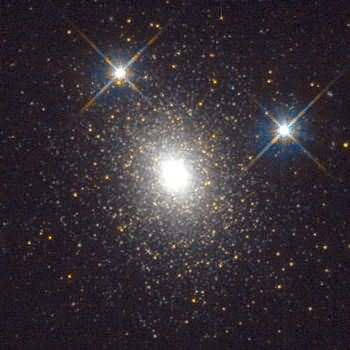

HST image of an old globular star cluster in galaxy M31

We believe our HST observations of NGC 4038/4039 and other merger galaxies also shed some new light on how young globular clusters form, i.e., from giant clouds of hydrogen gas that astronomers call Giant Molecular Clouds. Full-grown spiral galaxies like the Milky Way have typically 1000-2000 such clouds. An example is the GMC associated with the Eagle Nebula.

Credit: Michael Rich, Kenneth Mighell, and James D. Neill (Columbia University), Wendy Freedman (OCIW) and NASA/ESA